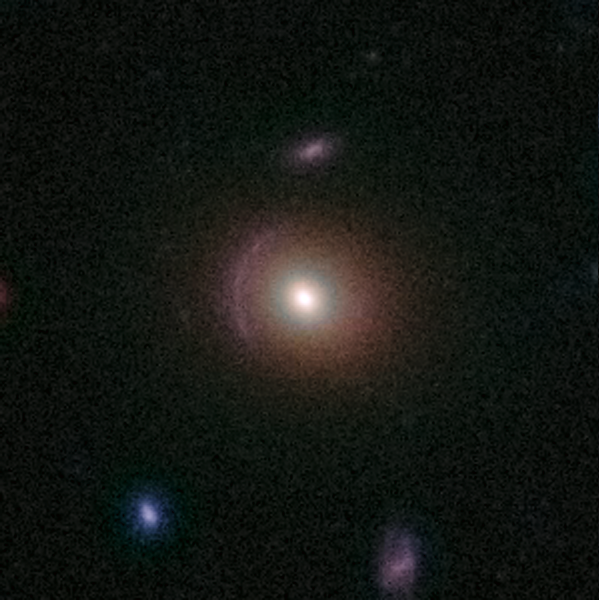

Gravitational Lens 0013+2249

This lens is an example of the rich diversity of 67 strong gravitational lenses found in the COSMOS survey. The lenses were discovered in a recently completed, large set of observations as part of a project to survey a single 1.6-square-degree field of sky (nine times the area of the full Moon) with several space-based and Earth-based observatories.

Gravitational lenses occur when light travelling towards us from a distant galaxy is magnified and distorted as it encounters a massive object between the galaxy and us. These gravitational lenses often allow astronomers to peer much further back into the early Universe than they would normally be able to.

This is a greyscale image taken by Hubble ACS camera and colourised with ground-based data from the CFHT (Canada-France-Hawaii Telescope).

Credit: NASA, ESA, C. Faure (Zentrum für Astronomie, University of Heidelberg) and J.P. Kneib (Laboratoire d'Astrophysique de Marseille)